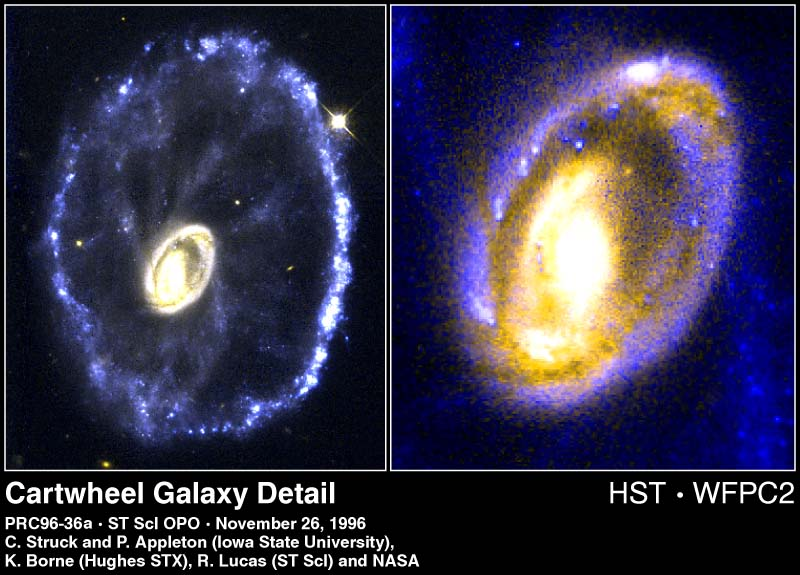

The Cartwheel Galaxy

Researchers analyzing the Hubble Space Telescope's dramatic pictures of the Cartwheel galaxy have discovered immense comet-like clouds of gas speeding through the heart of the galaxy at nearly 700, 000 mph.

Credit: Curt Struck and Philip Appleton (Iowa State University), Kirk Borne (Hughes STX Corporation), and Ray Lucas ( Space Telescope Science Institute), and NASA/ESA